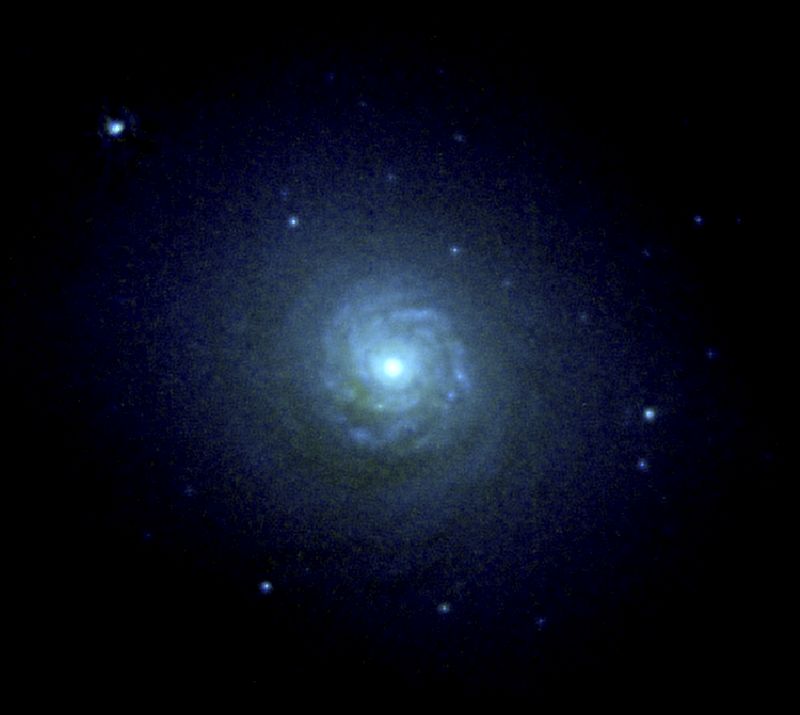

NGC 7257: spiral disk and globular star clusters at the core of a colliding galaxy

A NASA Hubble Space Telescope (HST) image of the core of the peculiar galaxy NGC 7252 reveals a striking "mini-spiral" disk of gas and stars, and about 40 exceptionally bright and young globular star clusters.

The strong spiral structure is 10,000 light-years across (7 arc seconds); the entire picture is 46,000 light-years across. Hubble's resolution is so good the astronomers can measure the diameters of the clusters (0.04 arc seconds, the apparent size of a dime at a distance of 60 miles). They turn out to be about 60 light-years in diameter, the same size as globular clusters that orbit our Milky Way galaxy.

This visible light image was taken with the Wide Field and Planetary Camera (WFPC) in PC mode, on October 10, 1992.

Credit: B. Whitmore (STScI), and NASA